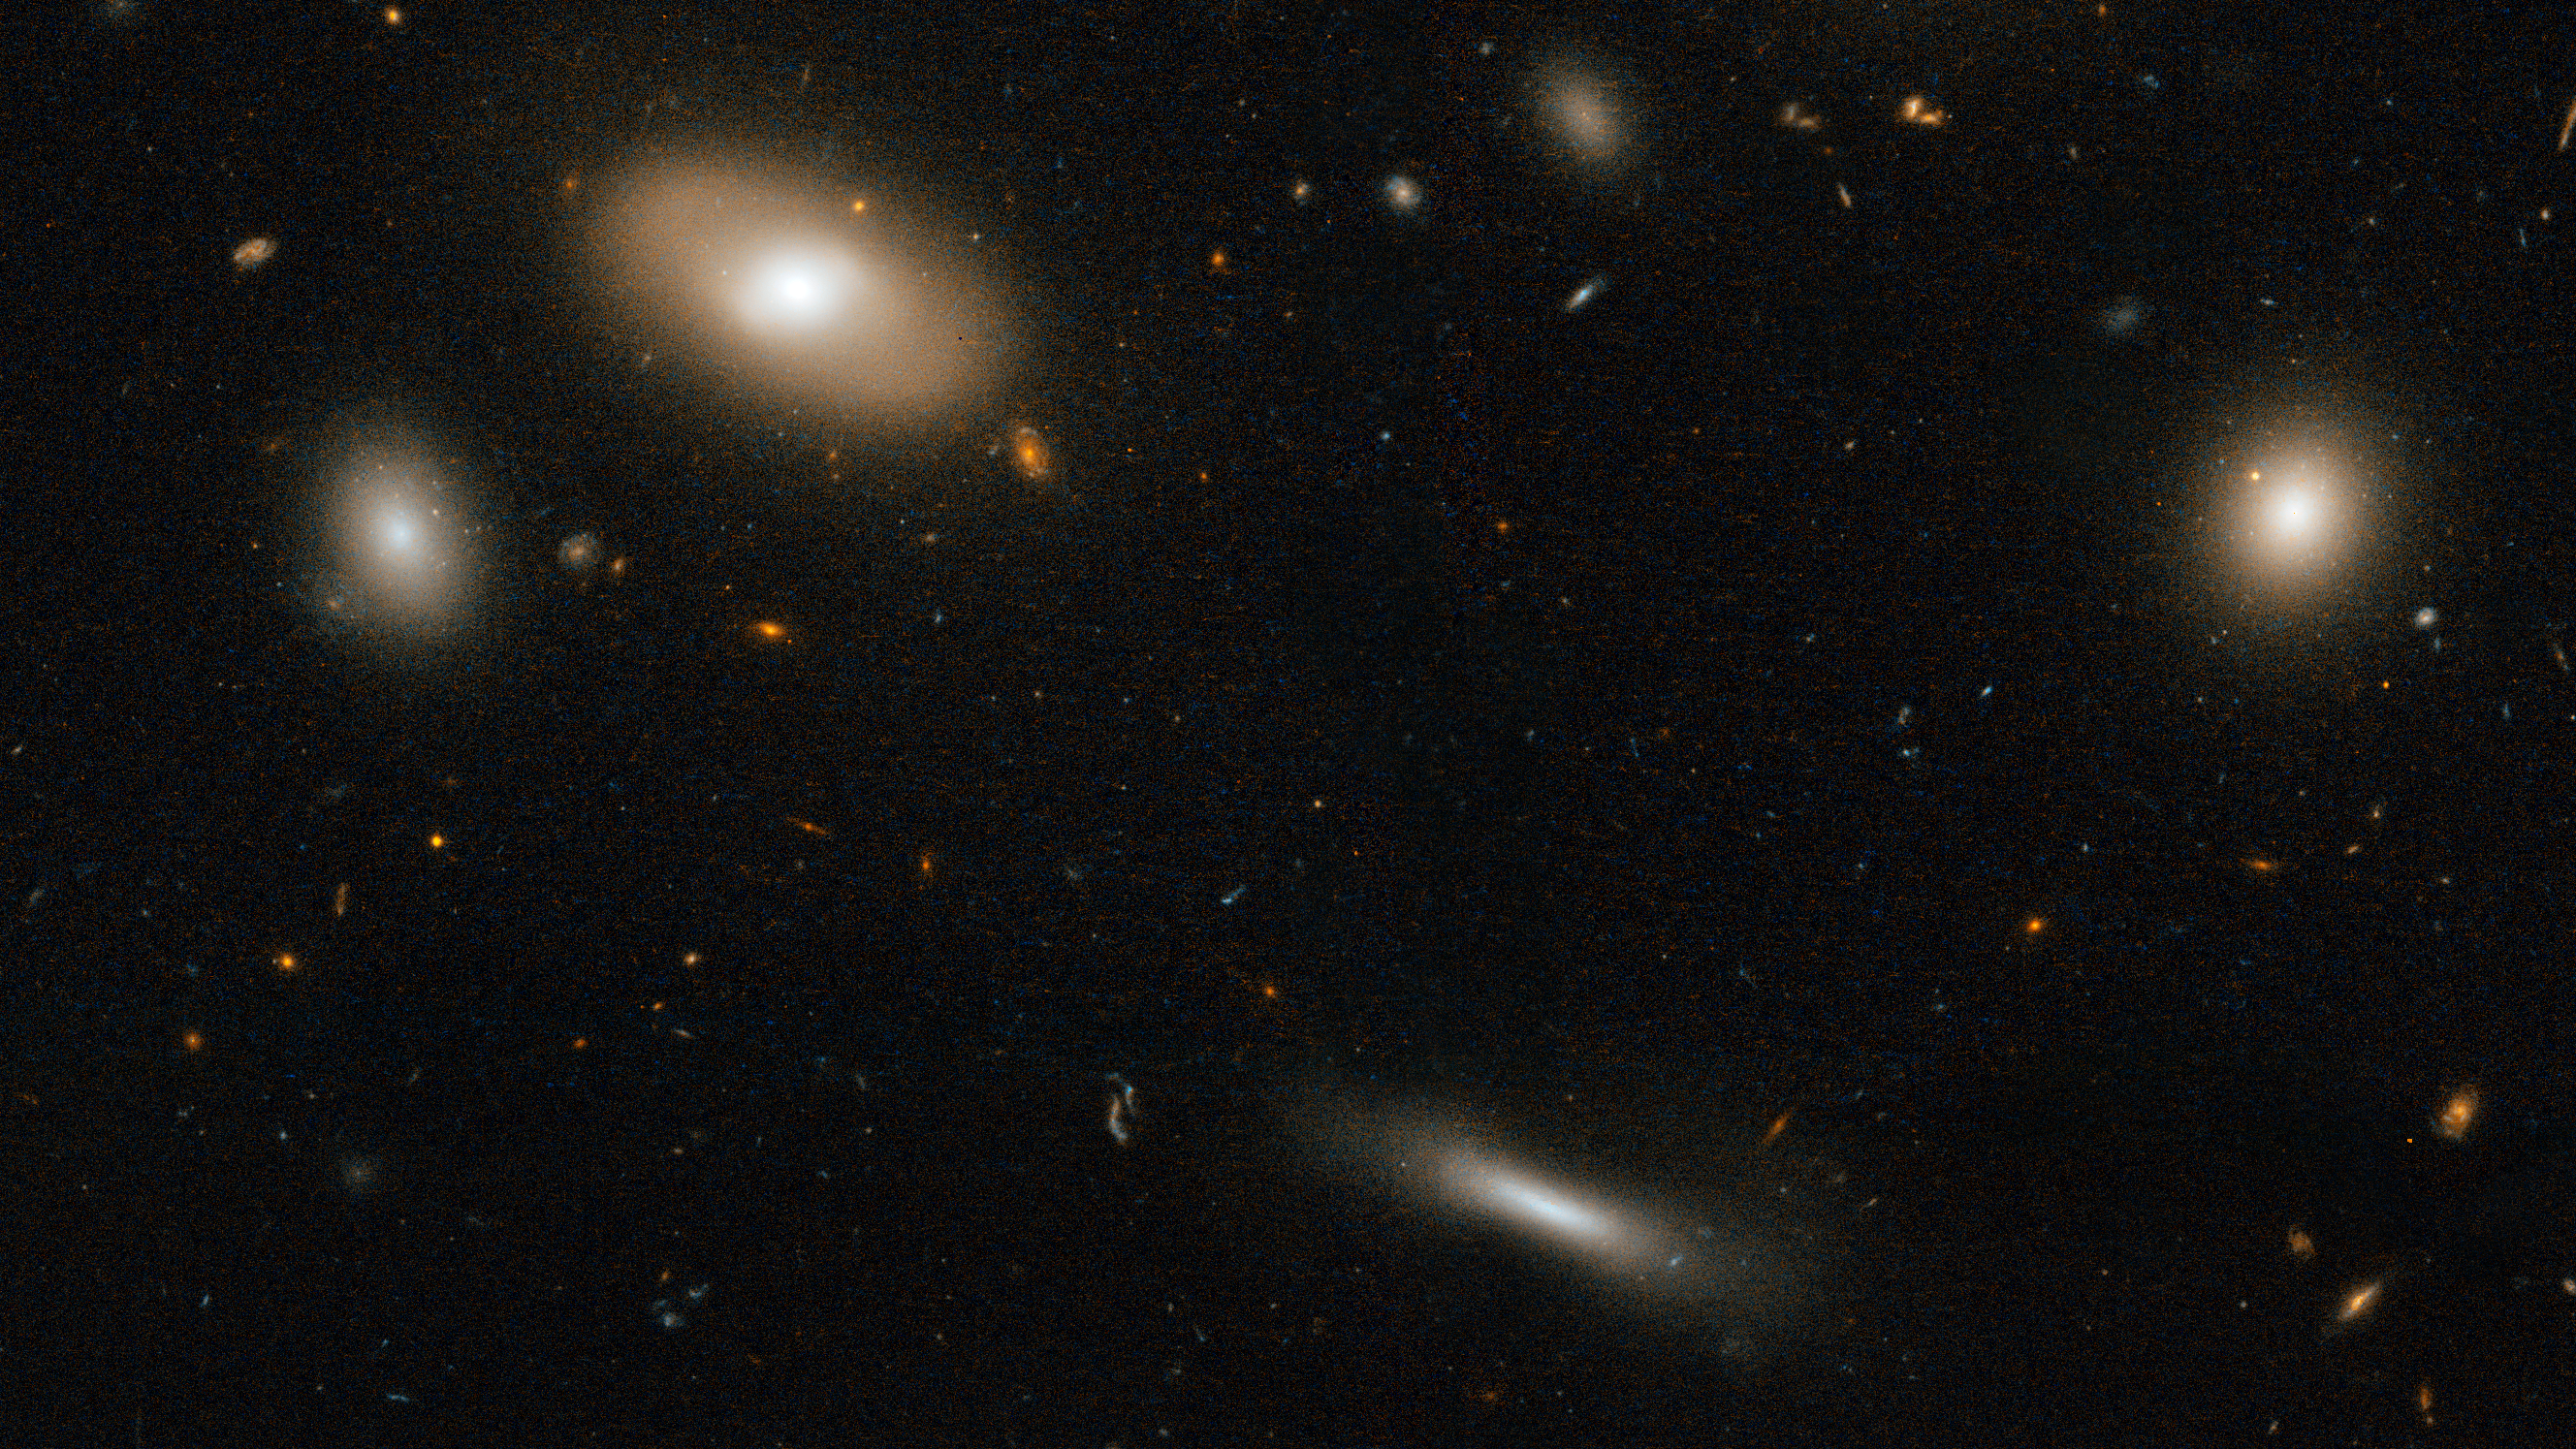

Coma Galaxy Cluster (Detail 2)

Varied galaxy types in the Coma Cluster.

Credit: NASA, ESA, and the Hubble Heritage Team (STScI/AURA). Acknowledgment: D. Carter (Liverpool John Moores University) and the Coma HST ACS Treasury Team.